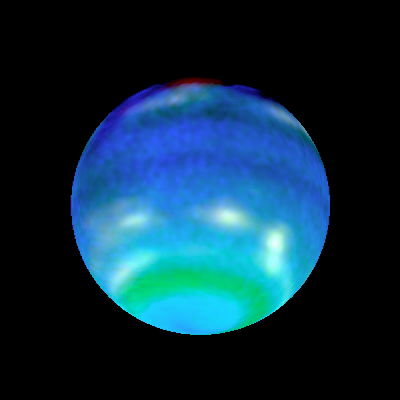

Opposite Hemispheres of Neptune

These views of Neptune, as seen through the Hubble Space Telescope, are helping planetary scientists gain some insight into the weird and wild weather that is a hallmark of the eighth planet from the sun. On Neptune, winds blow at 900 miles per hour (about 1450 kilometres per hour) and huge storms -- some the size of Earth itself -- come and go with regularity. How, precisely, Neptune's weather is driven is a mystery since the sun, which drives the Earth's weather, is 900 times dimmer there than on Earth. The bottom images show Neptune's Hubble portrait circa 1996. The top images were taken this year and help illustrate the dynamic weather features that dominate the planet.

Credit: Lawrence A. Sromovsky (University of Wisconsin-Madison) and NASA/ESA